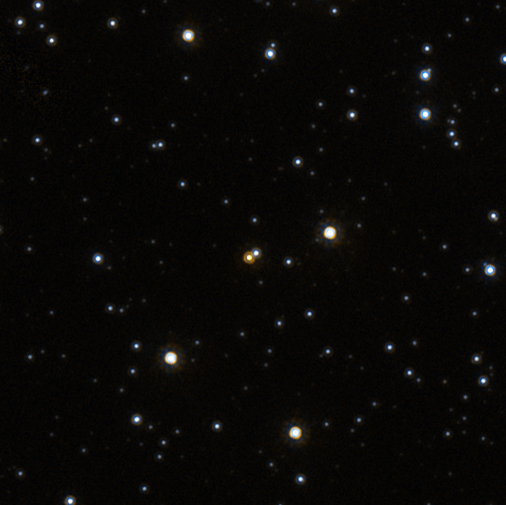

Hubble MACHO-LMC-5 2002

Astronomers have directly measured the mass of a single star; the first time such a feat has been accomplished for any solitary star other than our own Sun. The measurement has been done on a small red star located some 1,800 light-years from Earth. Knowing the masses of stars is important in understanding stellar evolution. Until now, scientists could only determine the masses of stars that are members of binary-star systems by applying Newton's laws of gravity to measurements of the stars' orbits around their center of gravity. The new measurement used Einstein's theory of relativity, combined with a large-scale program using ground-based telescopes, and the exquisite resolution of NASA's Hubble Space Telescope.

Credit: NASA, ESA and D. Bennett (University of Notre Dame)